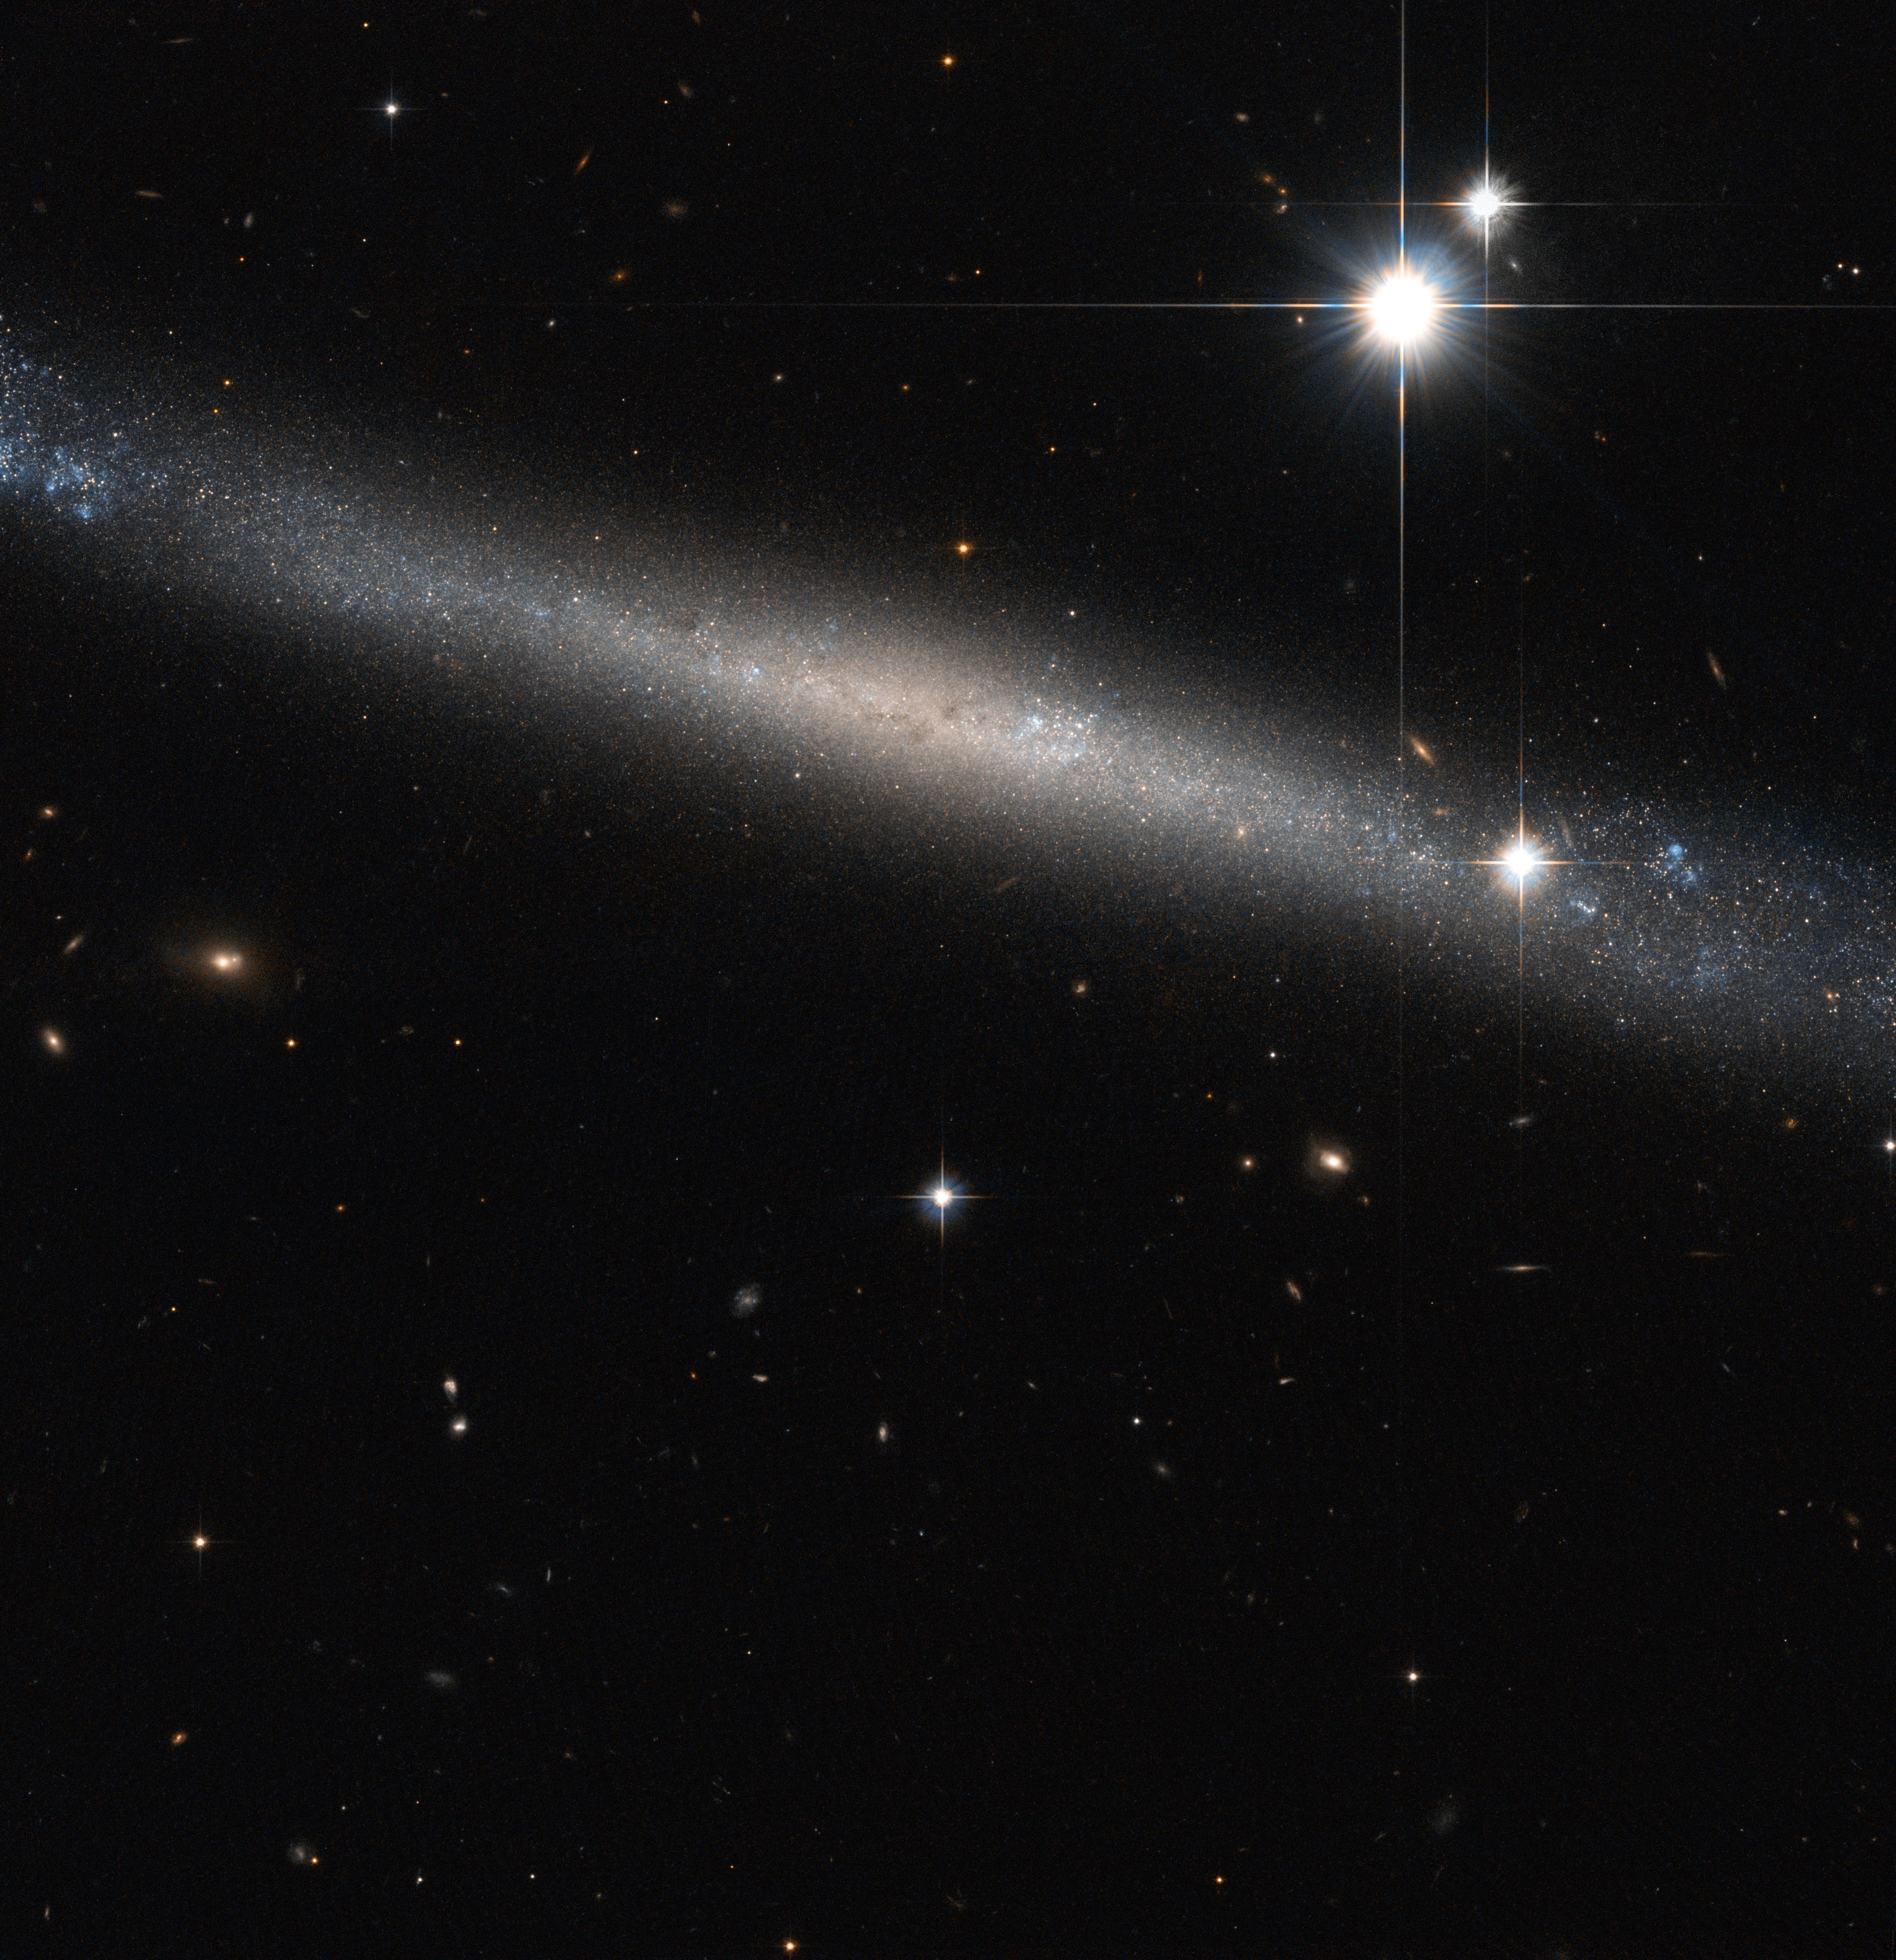

The Needle Galaxy

Like finding a silver needle in the haystack of space, the NASA/ESA Hubble Space Telescope has produced this beautiful image of the spiral galaxy IC 2233, one of the flattest galaxies known.

Typical spiral galaxies like the Milky Way are usually made up of three principal visible components: the disc where the spiral arms and most of the gas and dust is concentrated; the halo, a rough and sparse sphere around the disc that contains little gas, dust or star formation; and the central bulge at the heart of the disc, which is formed by a large concentration of ancient stars surrounding the Galactic Centre.

However, IC 2233 is far from being typical. This object is a prime example of a super-thin galaxy, where the galaxy’s diameter is at least ten times larger than the thickness. These galaxies consist of a simple disc of stars when seen edge on. This orientation makes them fascinating to study, giving another perspective on spiral galaxies. An important characteristic of this type of objects is that they have a low brightness and almost all of them have no bulge at all.

The bluish colour that can be seen along the disc gives evidence of the spiral nature of the galaxy, indicating the presence of hot, luminous, young stars, born out of clouds of interstellar gas. In addition, unlike typical spirals, IC 2233 shows no well-defined dust lane. Only a few small patchy regions can be identified in the inner regions both above and below the galaxy’s mid-plane.

Lying in the constellation of Lynx, IC 2233 is located about 40 million light-years away from Earth. This galaxy was discovered by British astronomer Isaac Roberts in 1894.

This image was taken with the Hubble’s Advanced Camera for Surveys, combining visible and infrared exposures. The field of view in this image is approximately 3.4 by 3.4 arcminutes.

A version of this image was entered into the Hubble's Hidden Treasures image processing competition by contestant Luca Limatola.

Credit: ESA/Hubble & NASA
Acknowledgement: Luca Limatola